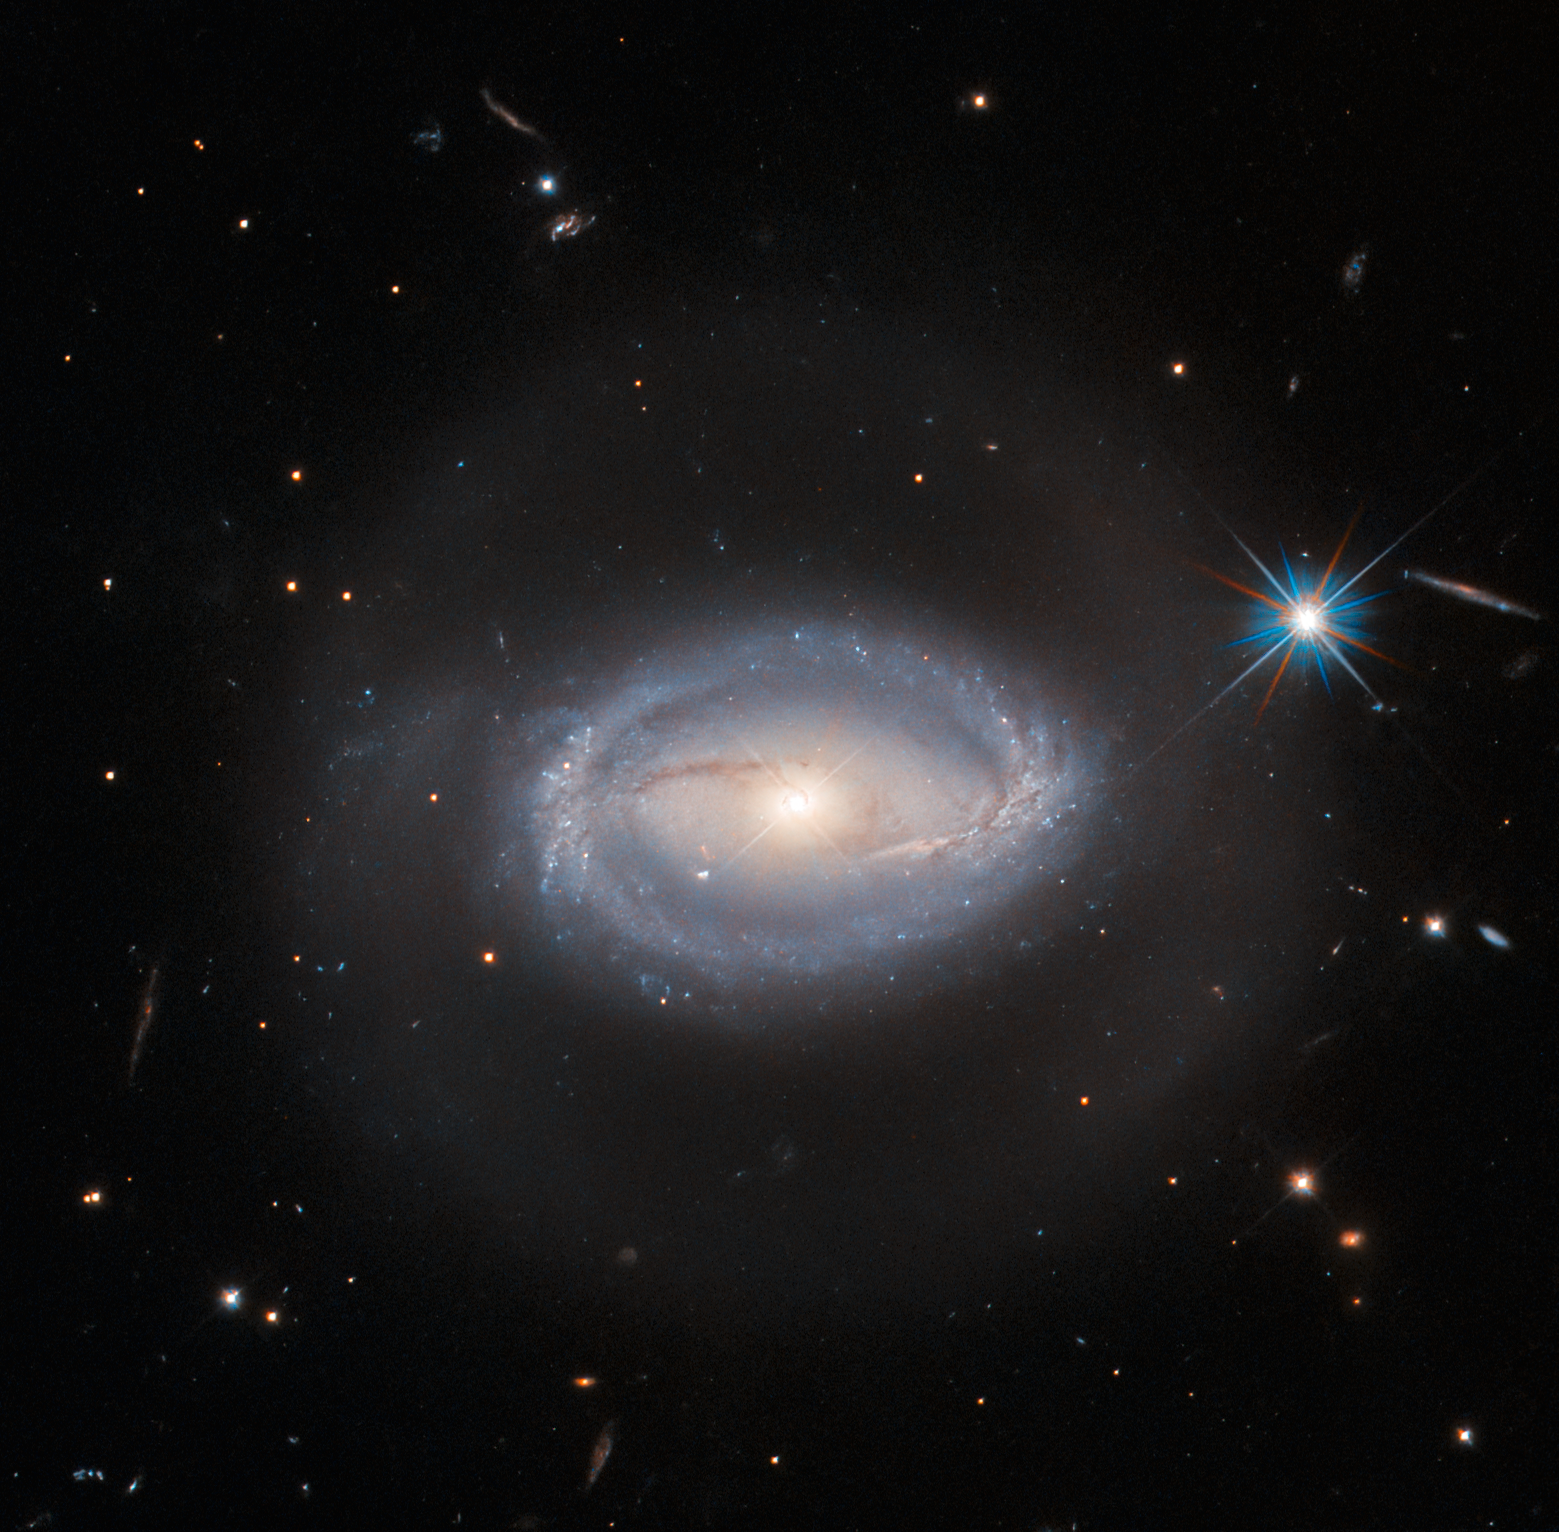

Everything, in one place, all at once

This luminous Picture of the Week shows Z 229-15 — imaged here in beautiful detail by the NASA/ESA Hubble Space Telescope — a celestial object that lies about 390 million light-years from Earth in the constellation Lyra. Z 229-15 is one of those interesting celestial objects that, should you choose to research it, you will find defined as several different things: sometimes as an active galactic nucleus (an AGN); sometimes as a quasar; and sometimes as a Seyfert galaxy. Which of these is Z 229-15 really? The answer is that it is all of these things all at once, because these three definitions have significant overlap.

AGNs and quasars are both described in detail in the Hubble Word Bank, but in essence an AGN is a small region at the heart of certain galaxies (called active galaxies) that is far brighter than just the galaxy’s stars would be. The extra luminosity is due to the presence of a supermassive black hole at the galaxy’s core. Material sucked into a black hole actually doesn’t fall directly into it, but instead is drawn into a swirling disc, from where it is inexorably tugged towards the black hole. This disc of matter gets so hot that it releases a large amount of energy across the electromagnetic spectrum, and that’s what makes AGNs appear so bright.

Quasars are a particular type of AGN; they are typically both extremely bright and extremely distant from Earth — several hundred million light-years is considered nearby for a quasar, making Z 229-15 positively local. Often an AGN is so bright that the rest of the galaxy cannot be seen, but Seyfert galaxies are active galaxies that host very bright AGNs (quasars) while the rest of the galaxy is still observable. So Z 229-15 is a Seyfert galaxy that contains a quasar, and that, by definition, hosts an AGN. Classification in astronomy can be a challenge!

Credit: ESA/Hubble & NASA, A. Barth, R. Mushotzky